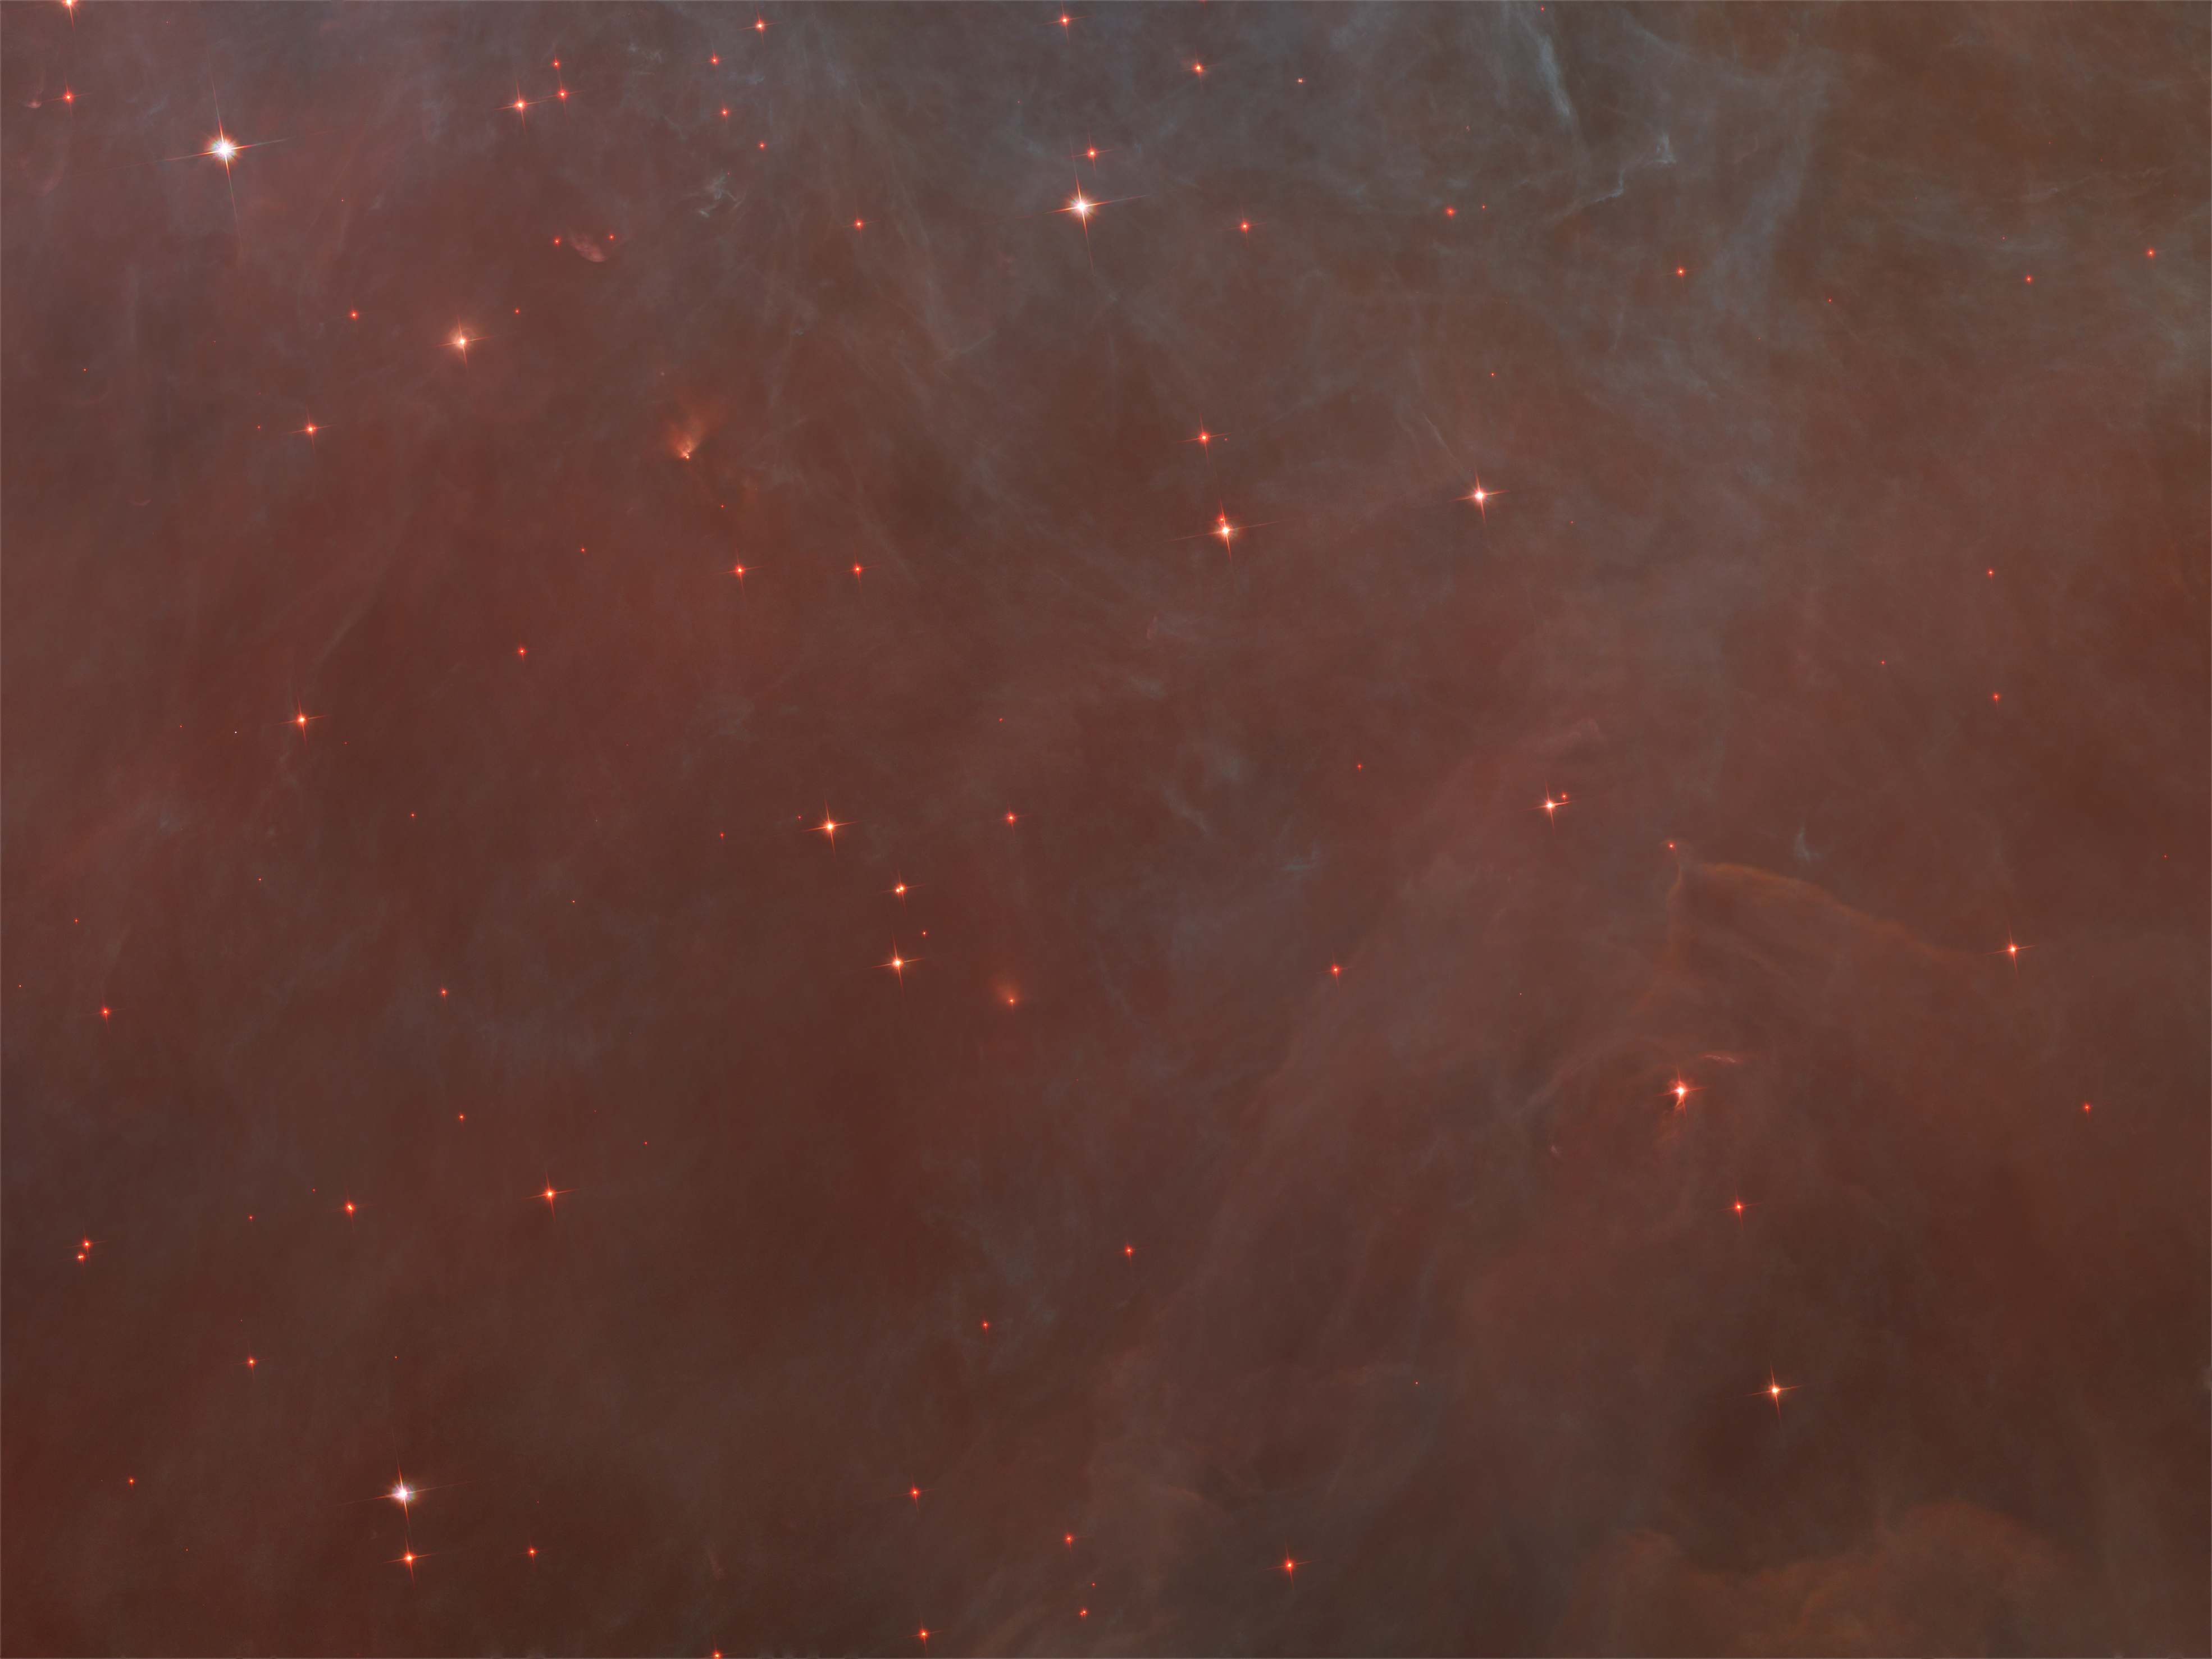

Failing stars

The faint red stars in this close-up image are the myriad brown dwarfs that Hubble spied for the first time in the Orion Nebula in visible light. Sometimes called "failed stars", brown dwarfs are cool objects that are too small to be ordinary stars because they cannot sustain nuclear fusion in their cores the way our Sun does.

Credit: NASA, ESA, M. Robberto ( Space Telescope Science Institute/ESA) and the Hubble Space Telescope Orion Treasury Project Team